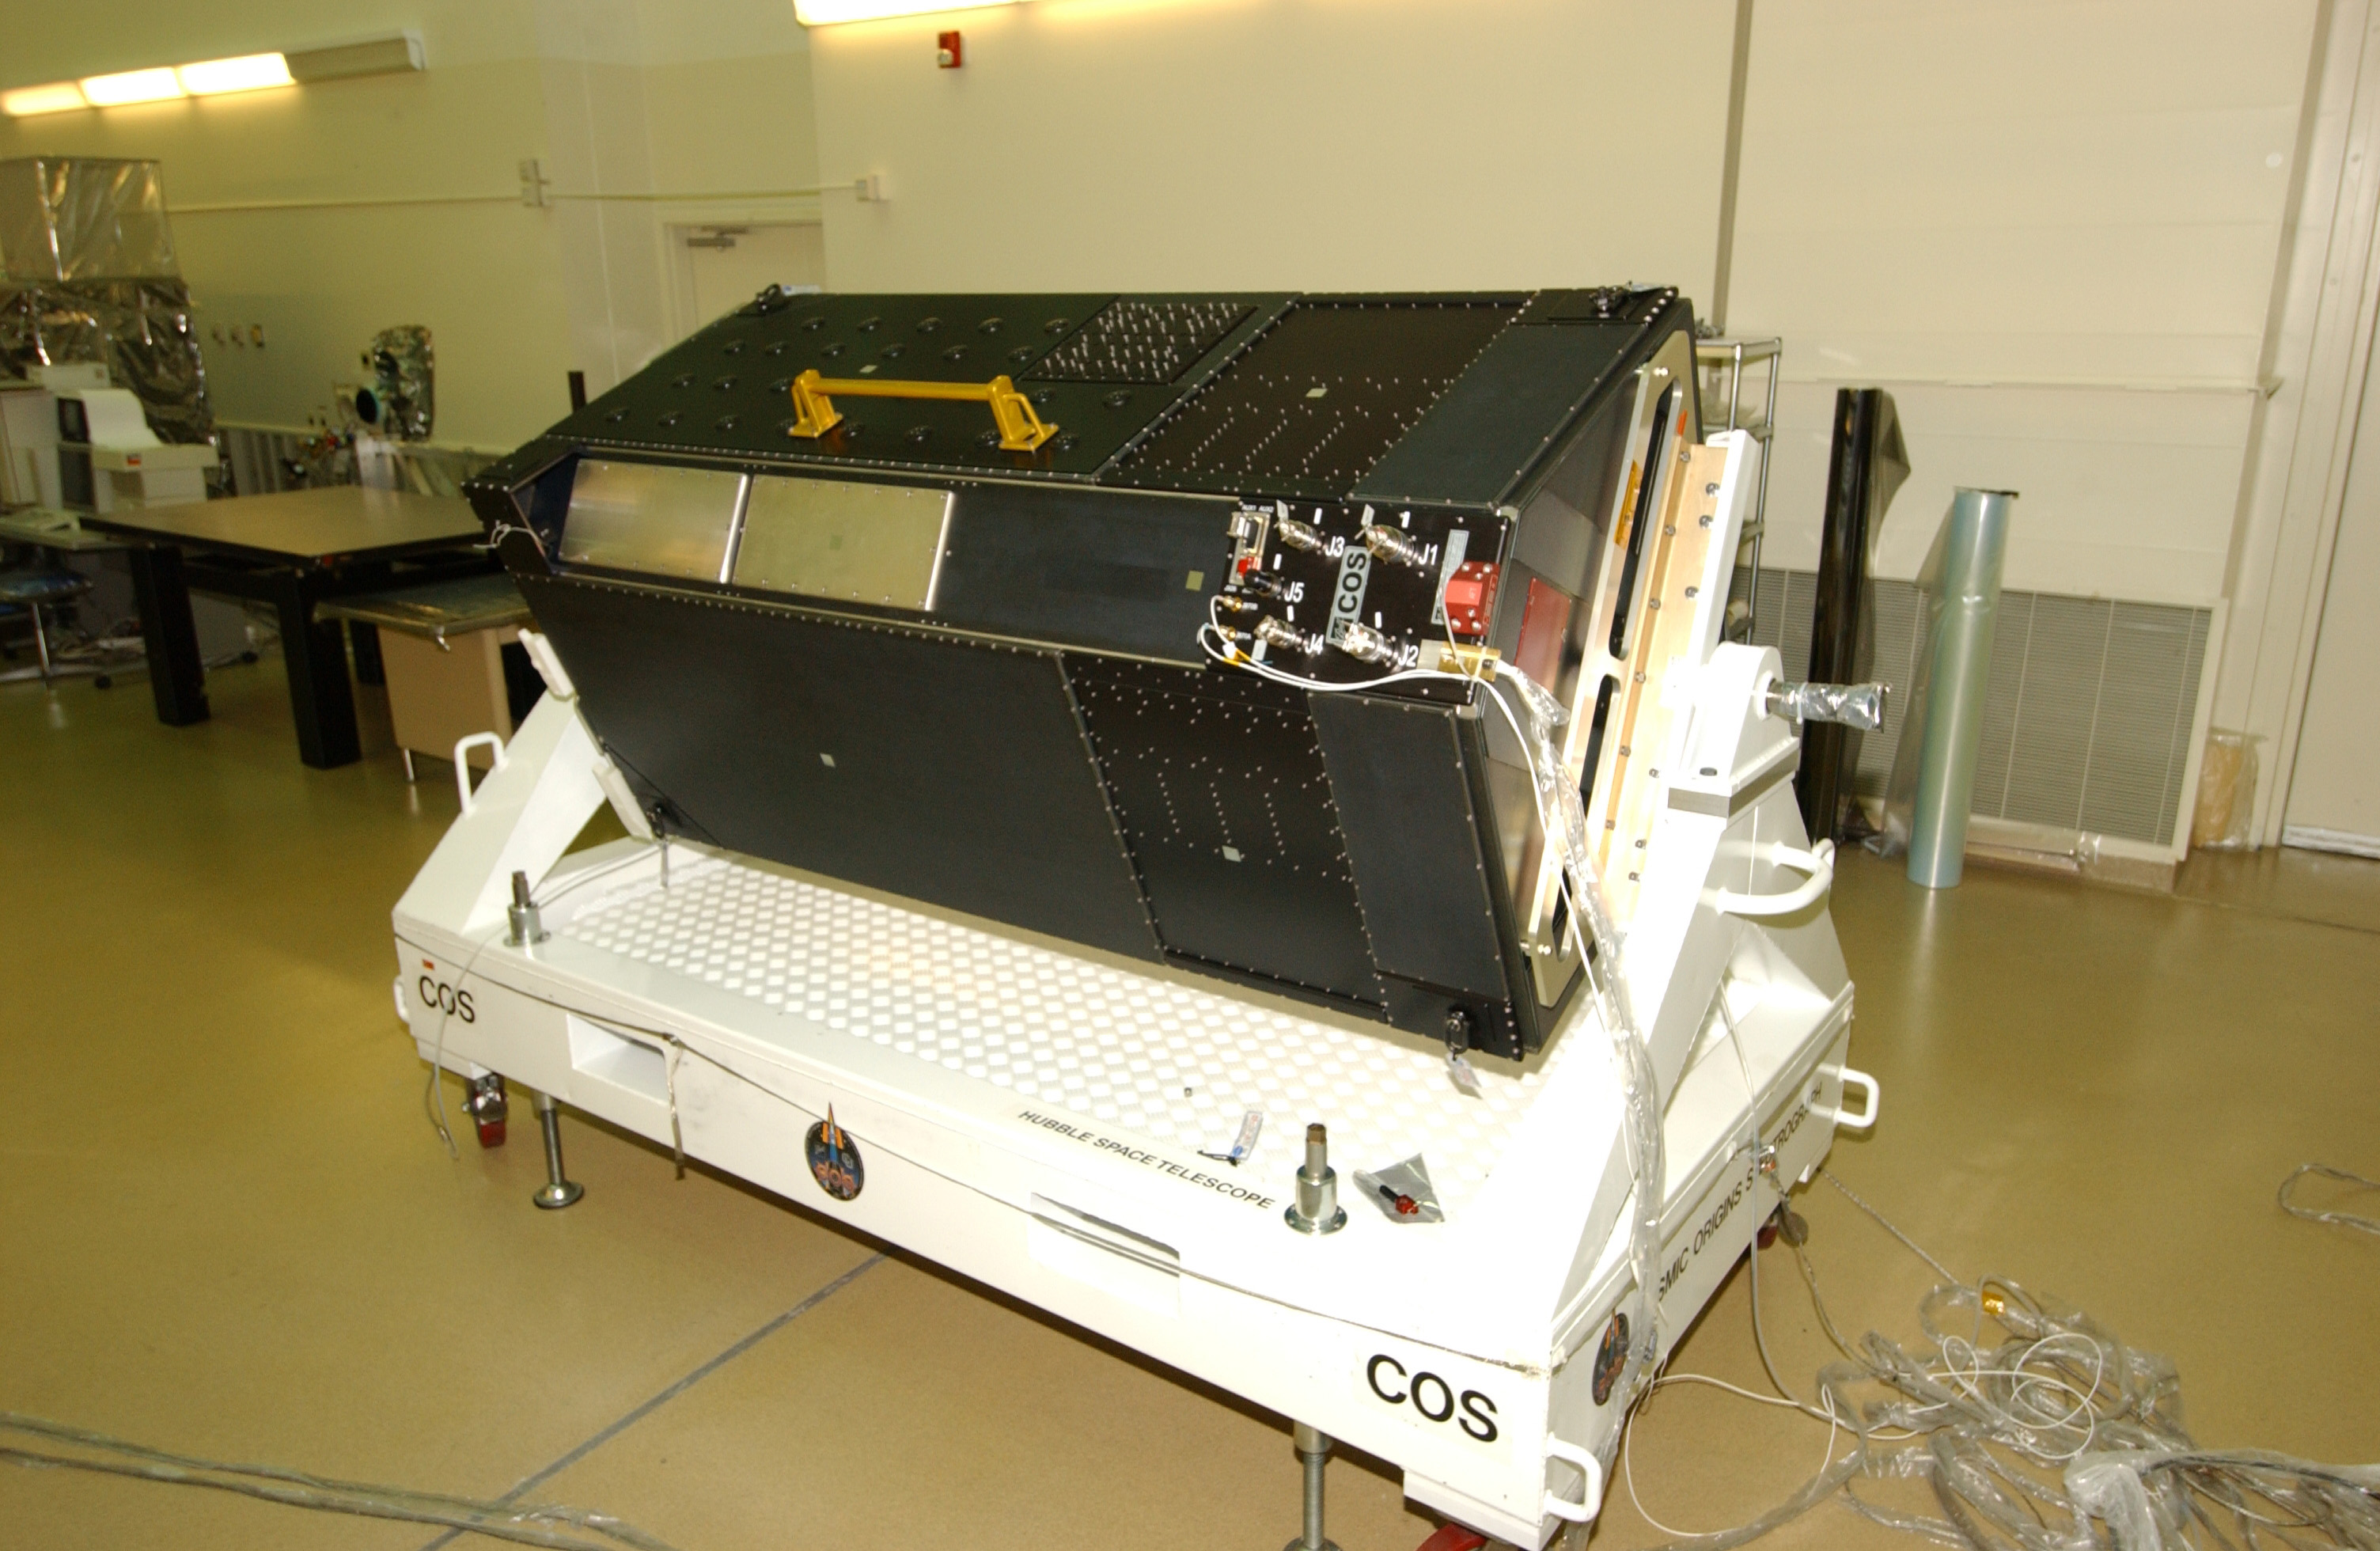

The Cosmic Origins Spectrograph

Cosmic Origins Spectrograph (COS), in the Clean Room at Goddard Space Flight Center showing the connector panel. Aboard Hubble, COS will study the large-scale structure of the Universe and the formation and evolution of galaxies, stars and planets. It will also help determine the formation of elements considered essential for life, such as carbon and iron.

Credit: NASA